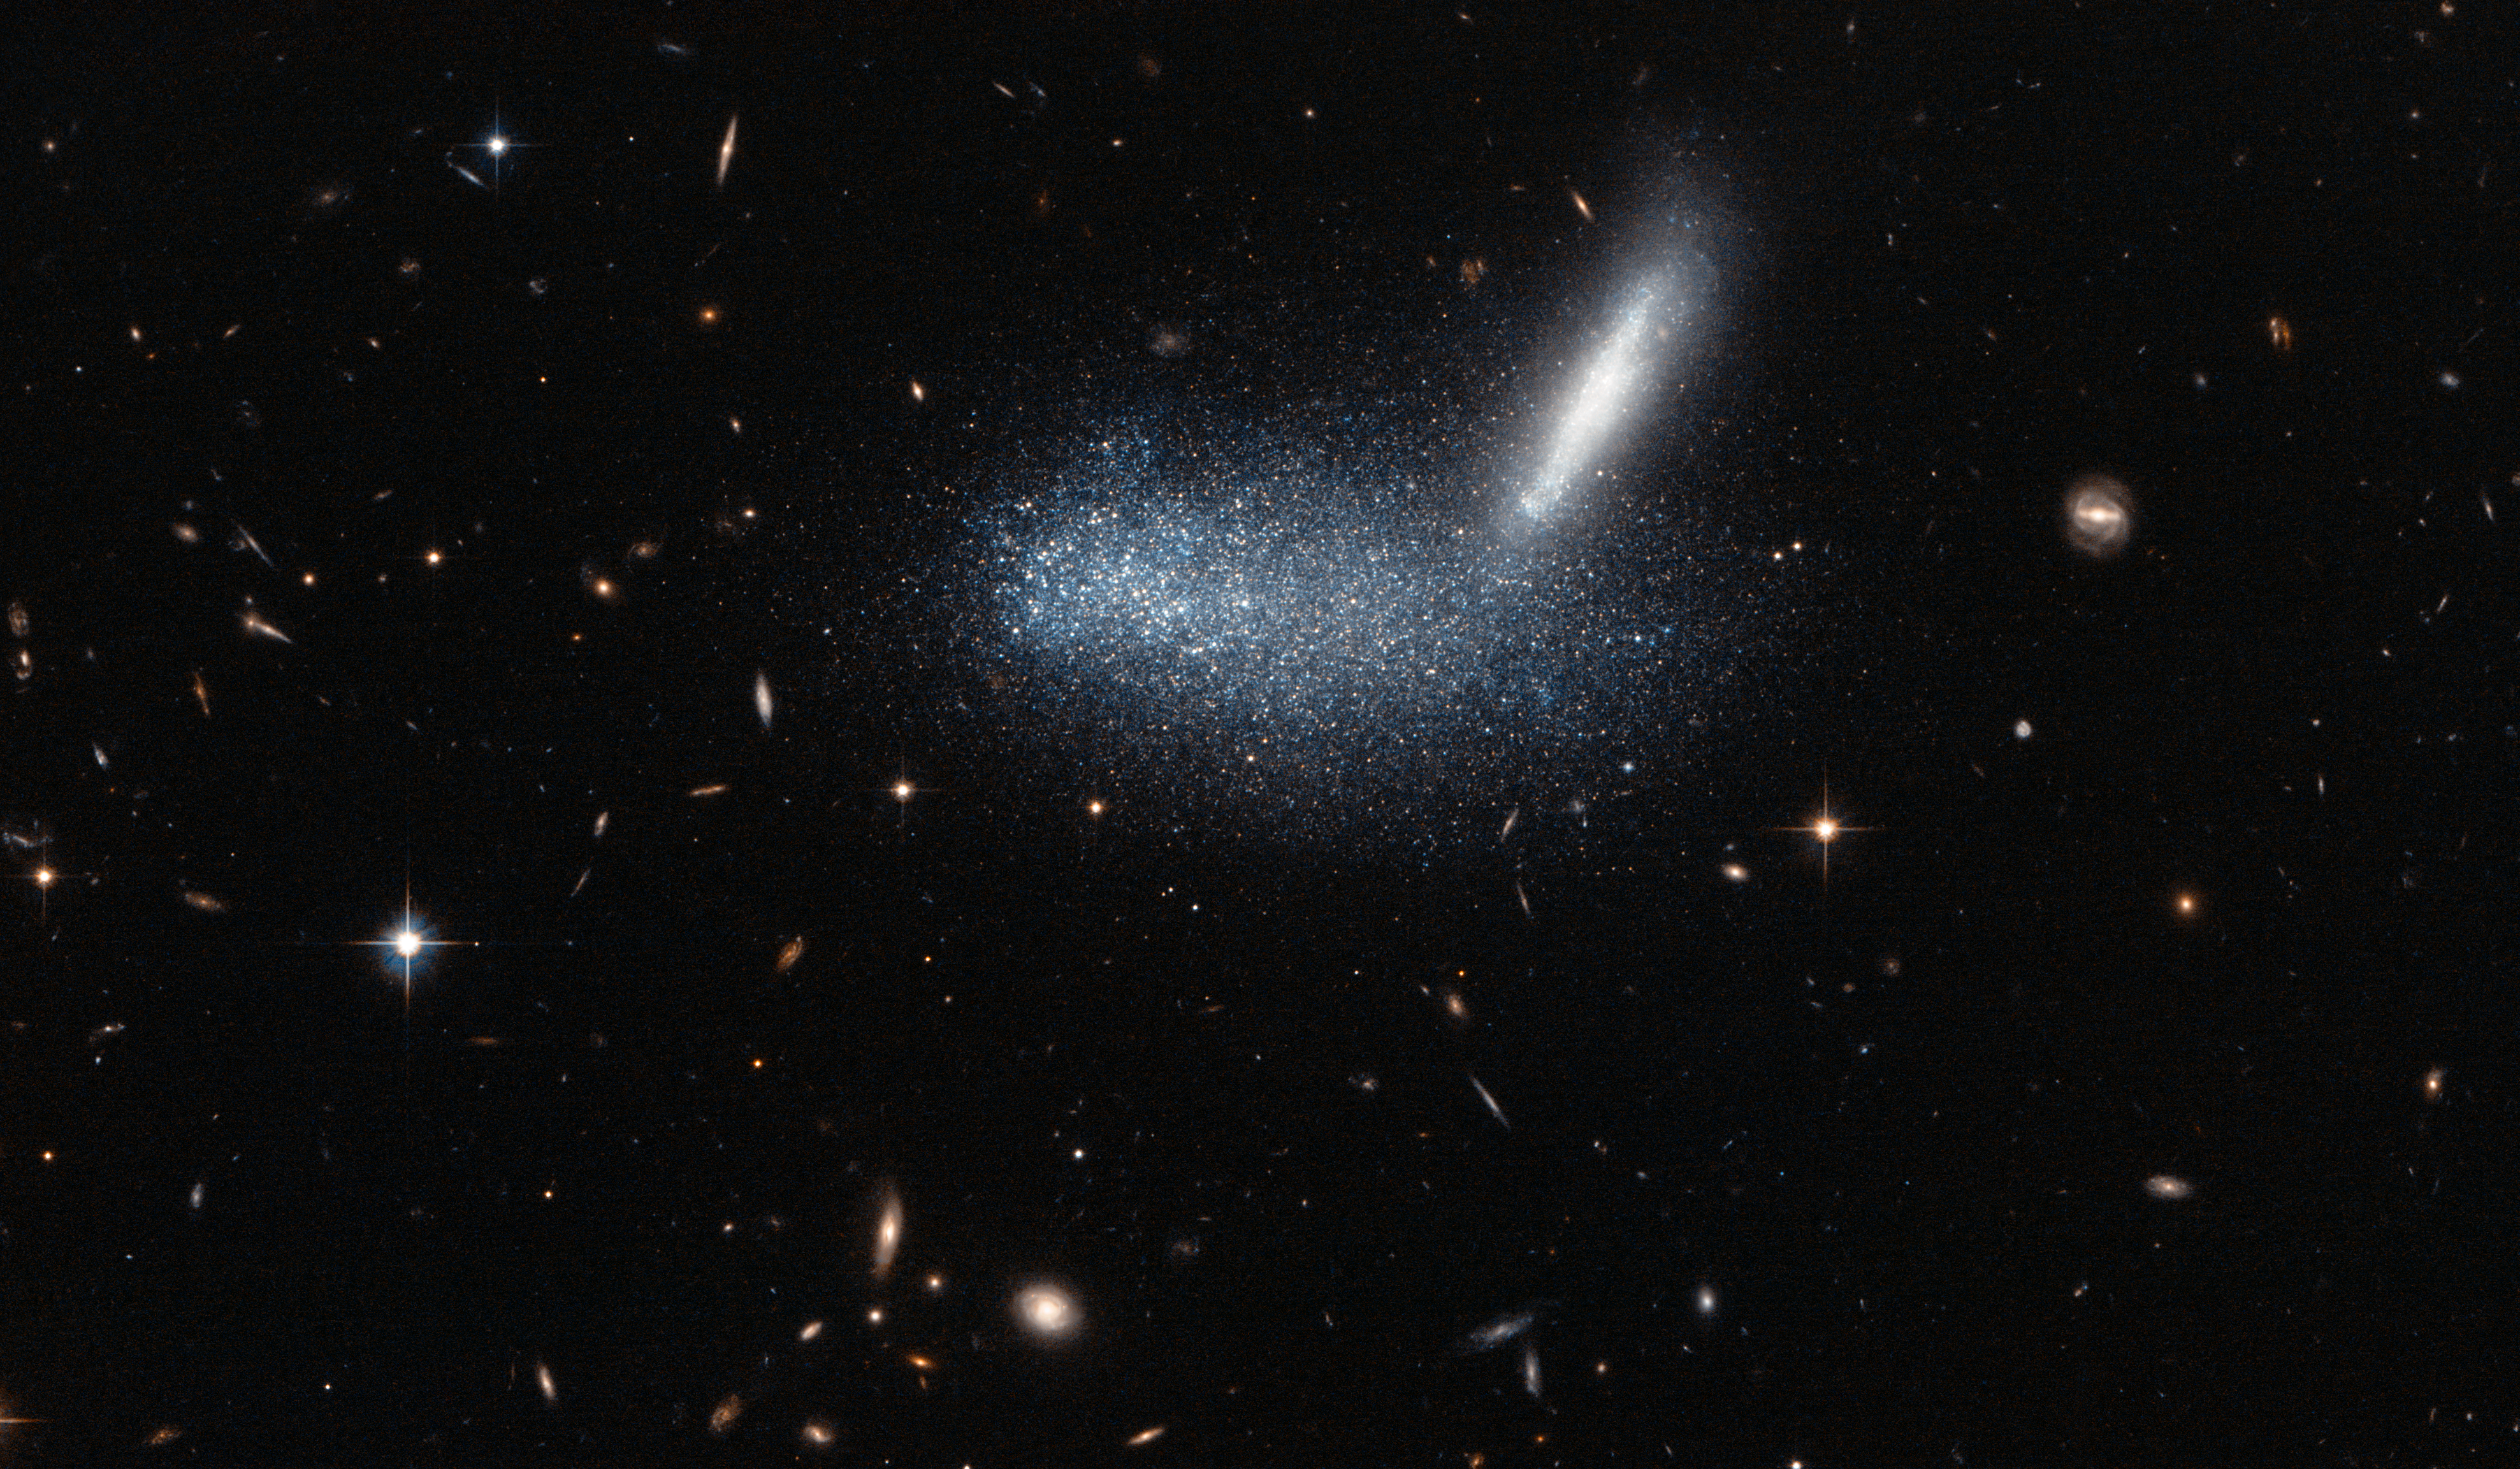

A cosmic optical illusion

At first glance, this Hubble picture appears to capture two space colossi entangled in a fierce celestial battle, with two galaxies entwined and merging to form one. But this shows just how easy it is to misinterpret the jumble of sparkling stars and get the wrong impression — as it’s all down to a trick of perspective.

By chance, these galaxies appear to be aligned from our point of view. In the foreground, the irregular dwarf galaxy PGC 16389 — seen here as a cloud of stars — covers its neighbouring galaxy APMBGC 252+125-117, which appears edge-on as a streak. This wide-field image also captures many other more distant galaxies, including a quite prominent face-on spiral towards the right of the picture.

A version of this image was entered into the Hubble’s Hidden Treasures image processing competition by contestant Luca Limatola.

Credit: ESA/Hubble & NASA Acknowledgement: Luca Limatola